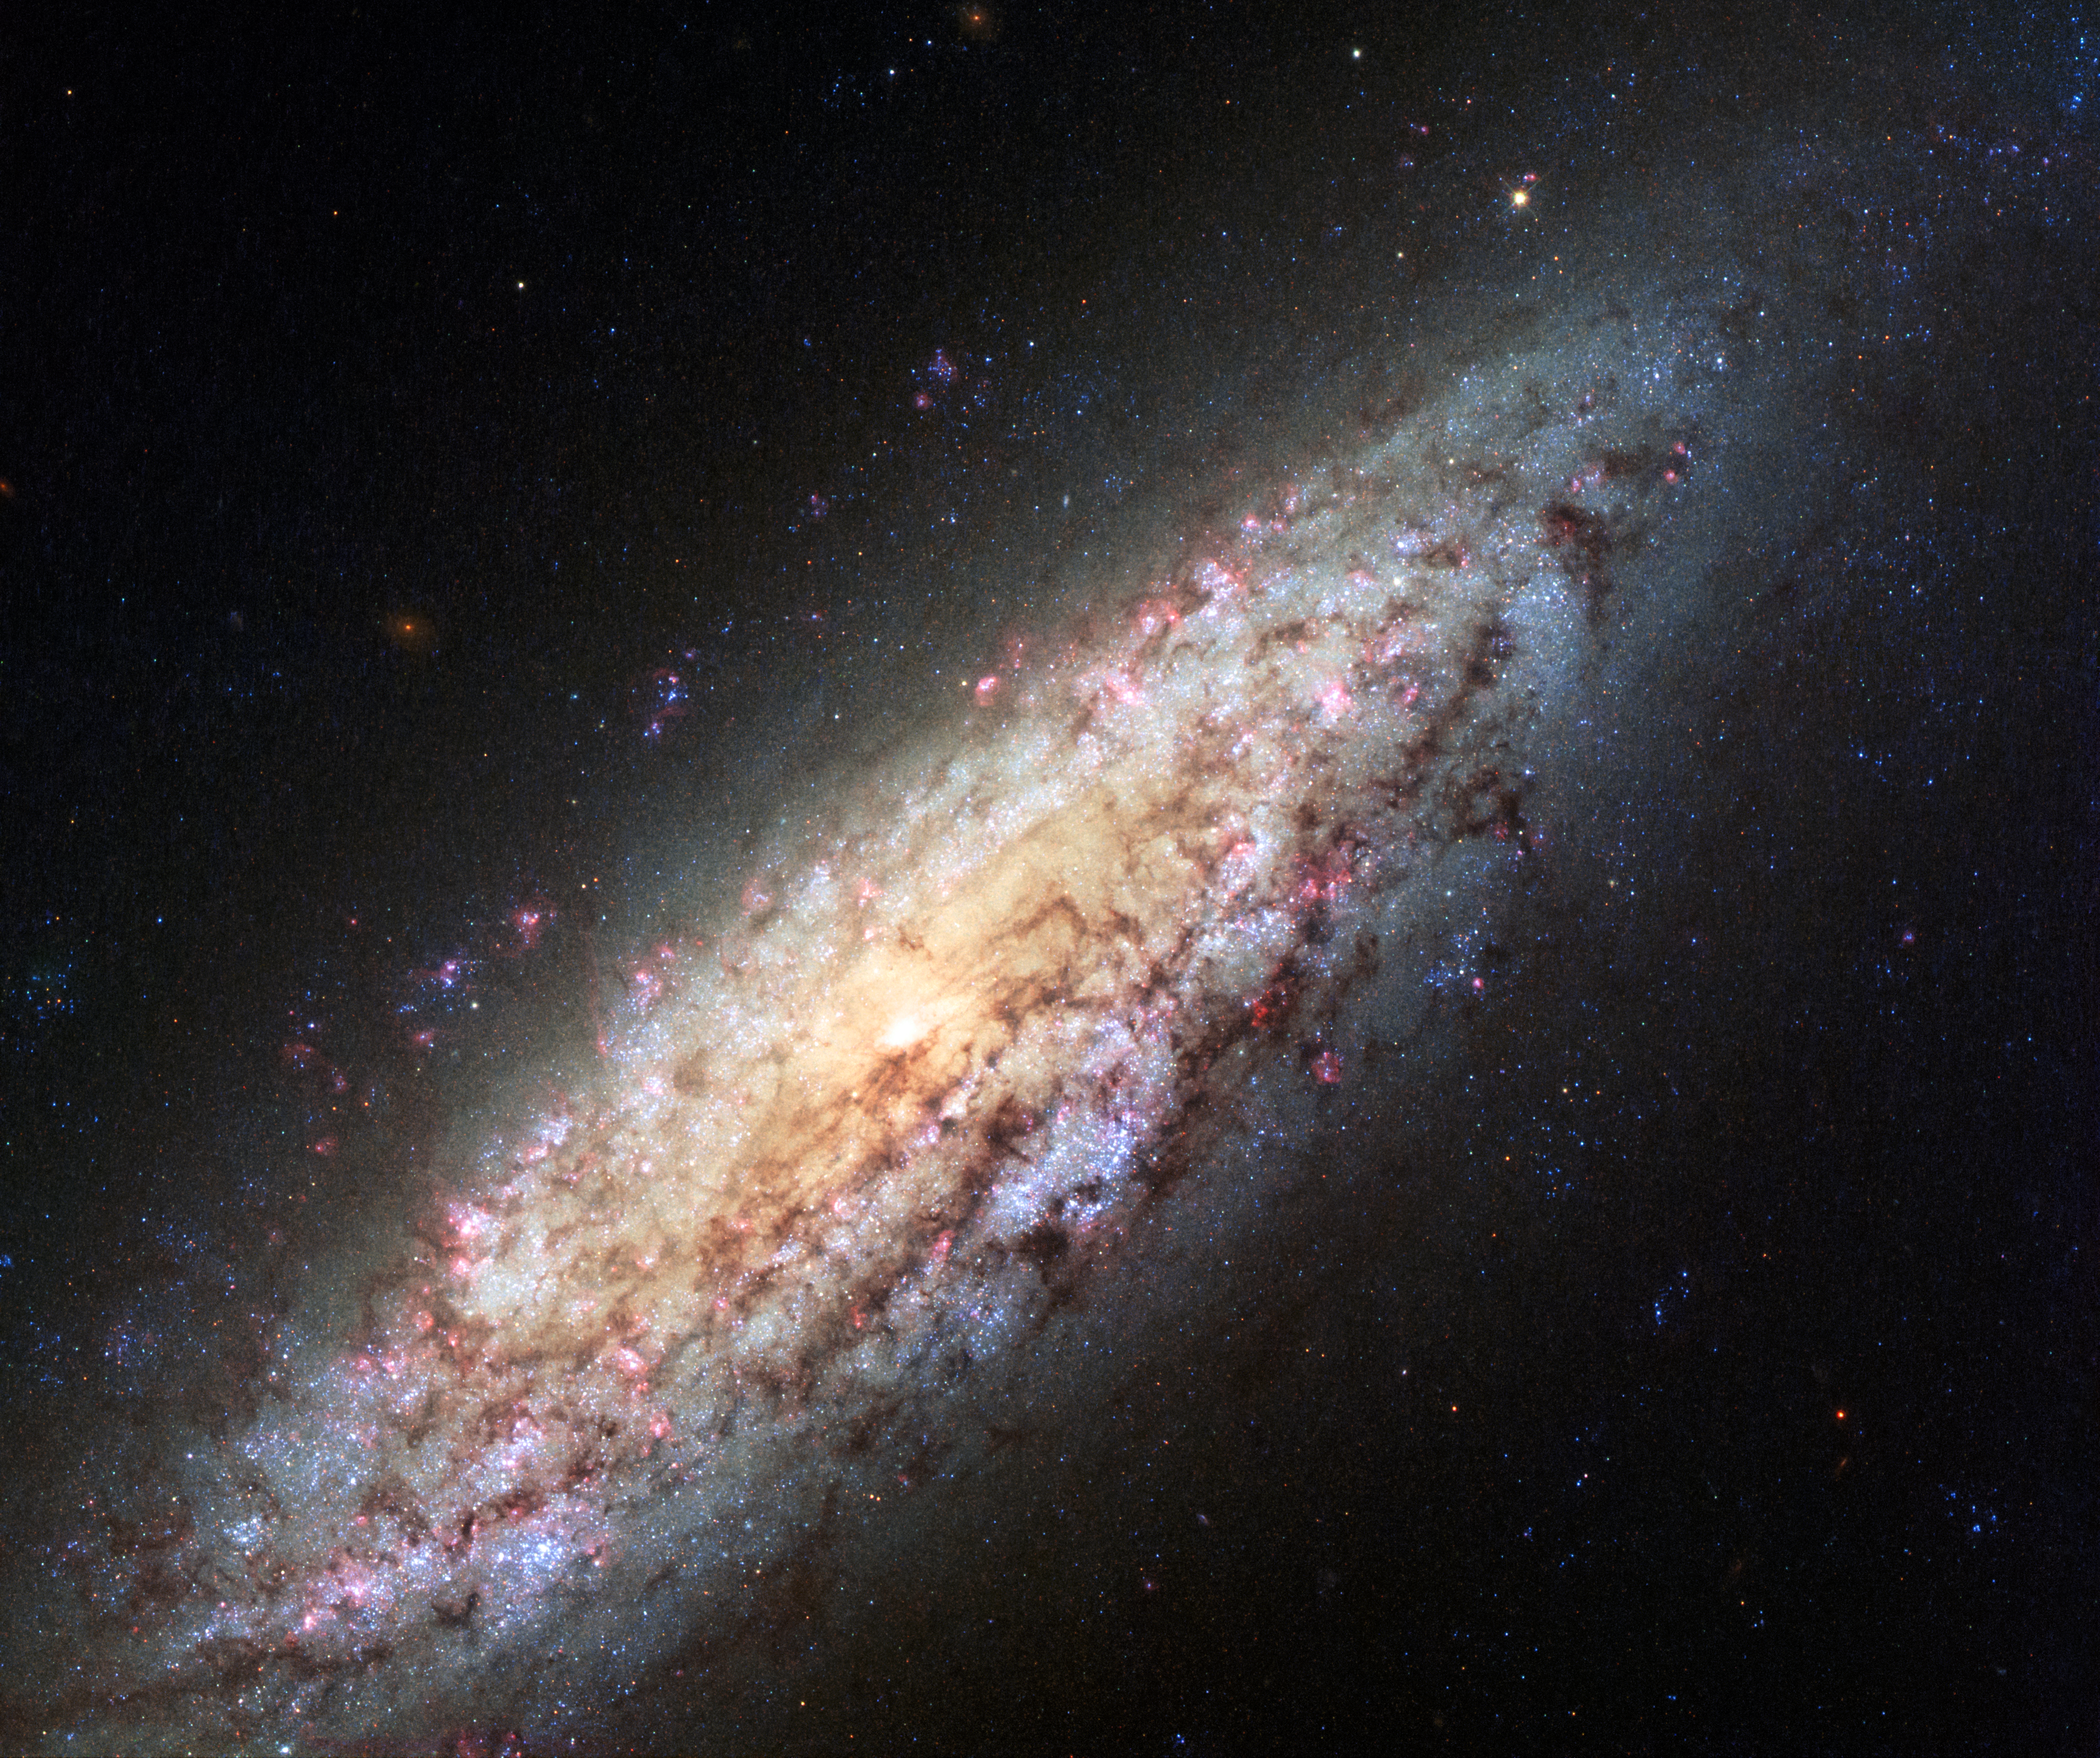

NGC 6503

This NASA/ESA Hubble Space Telescope image shows galaxy NGC 6503. The galaxy, which lies about 18 million light-years away is at the edge of a strangely empty patch of space called the Local Void.

This new image shows a very rich set of colours, adding to the detail seen in previous images.

Credit: NASA, ESA